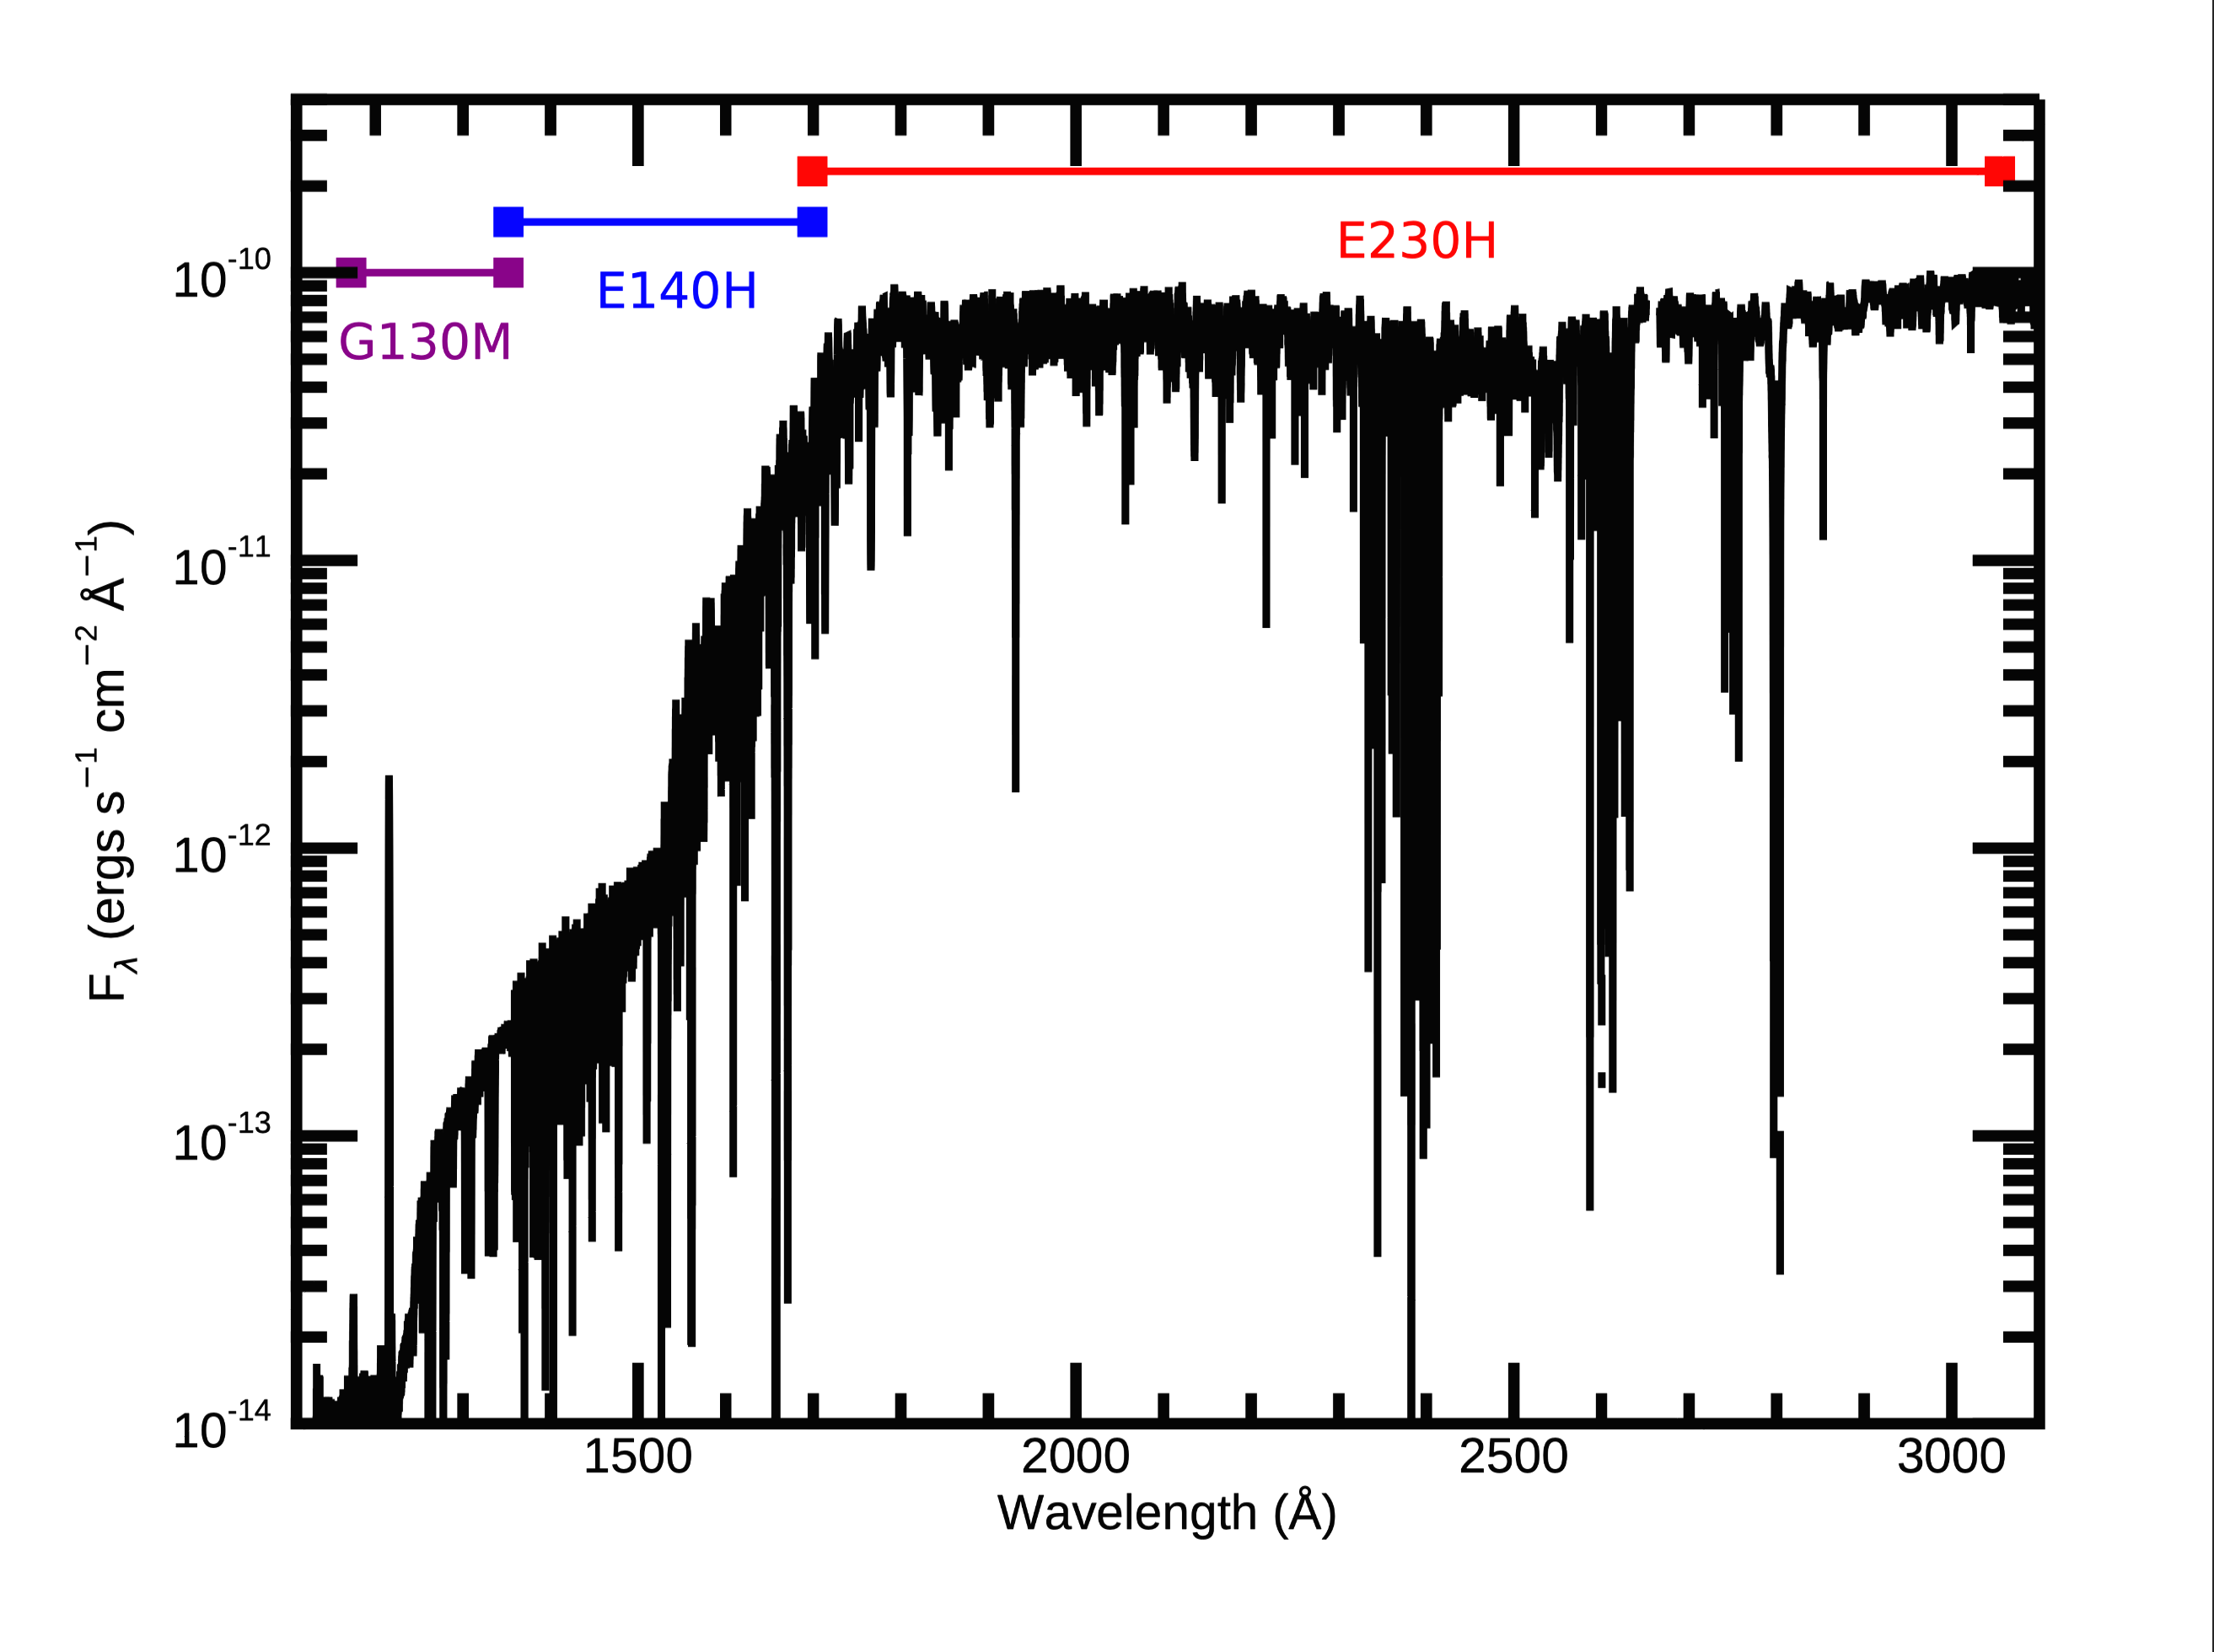

UV spectral energy distribution of β Pictoris in eHST

This image shows the full UV spectral energy distribution of β Pictoris from the HLSA that combines data from three separate COS and STIS gratings.

Credit: STScI/MAST